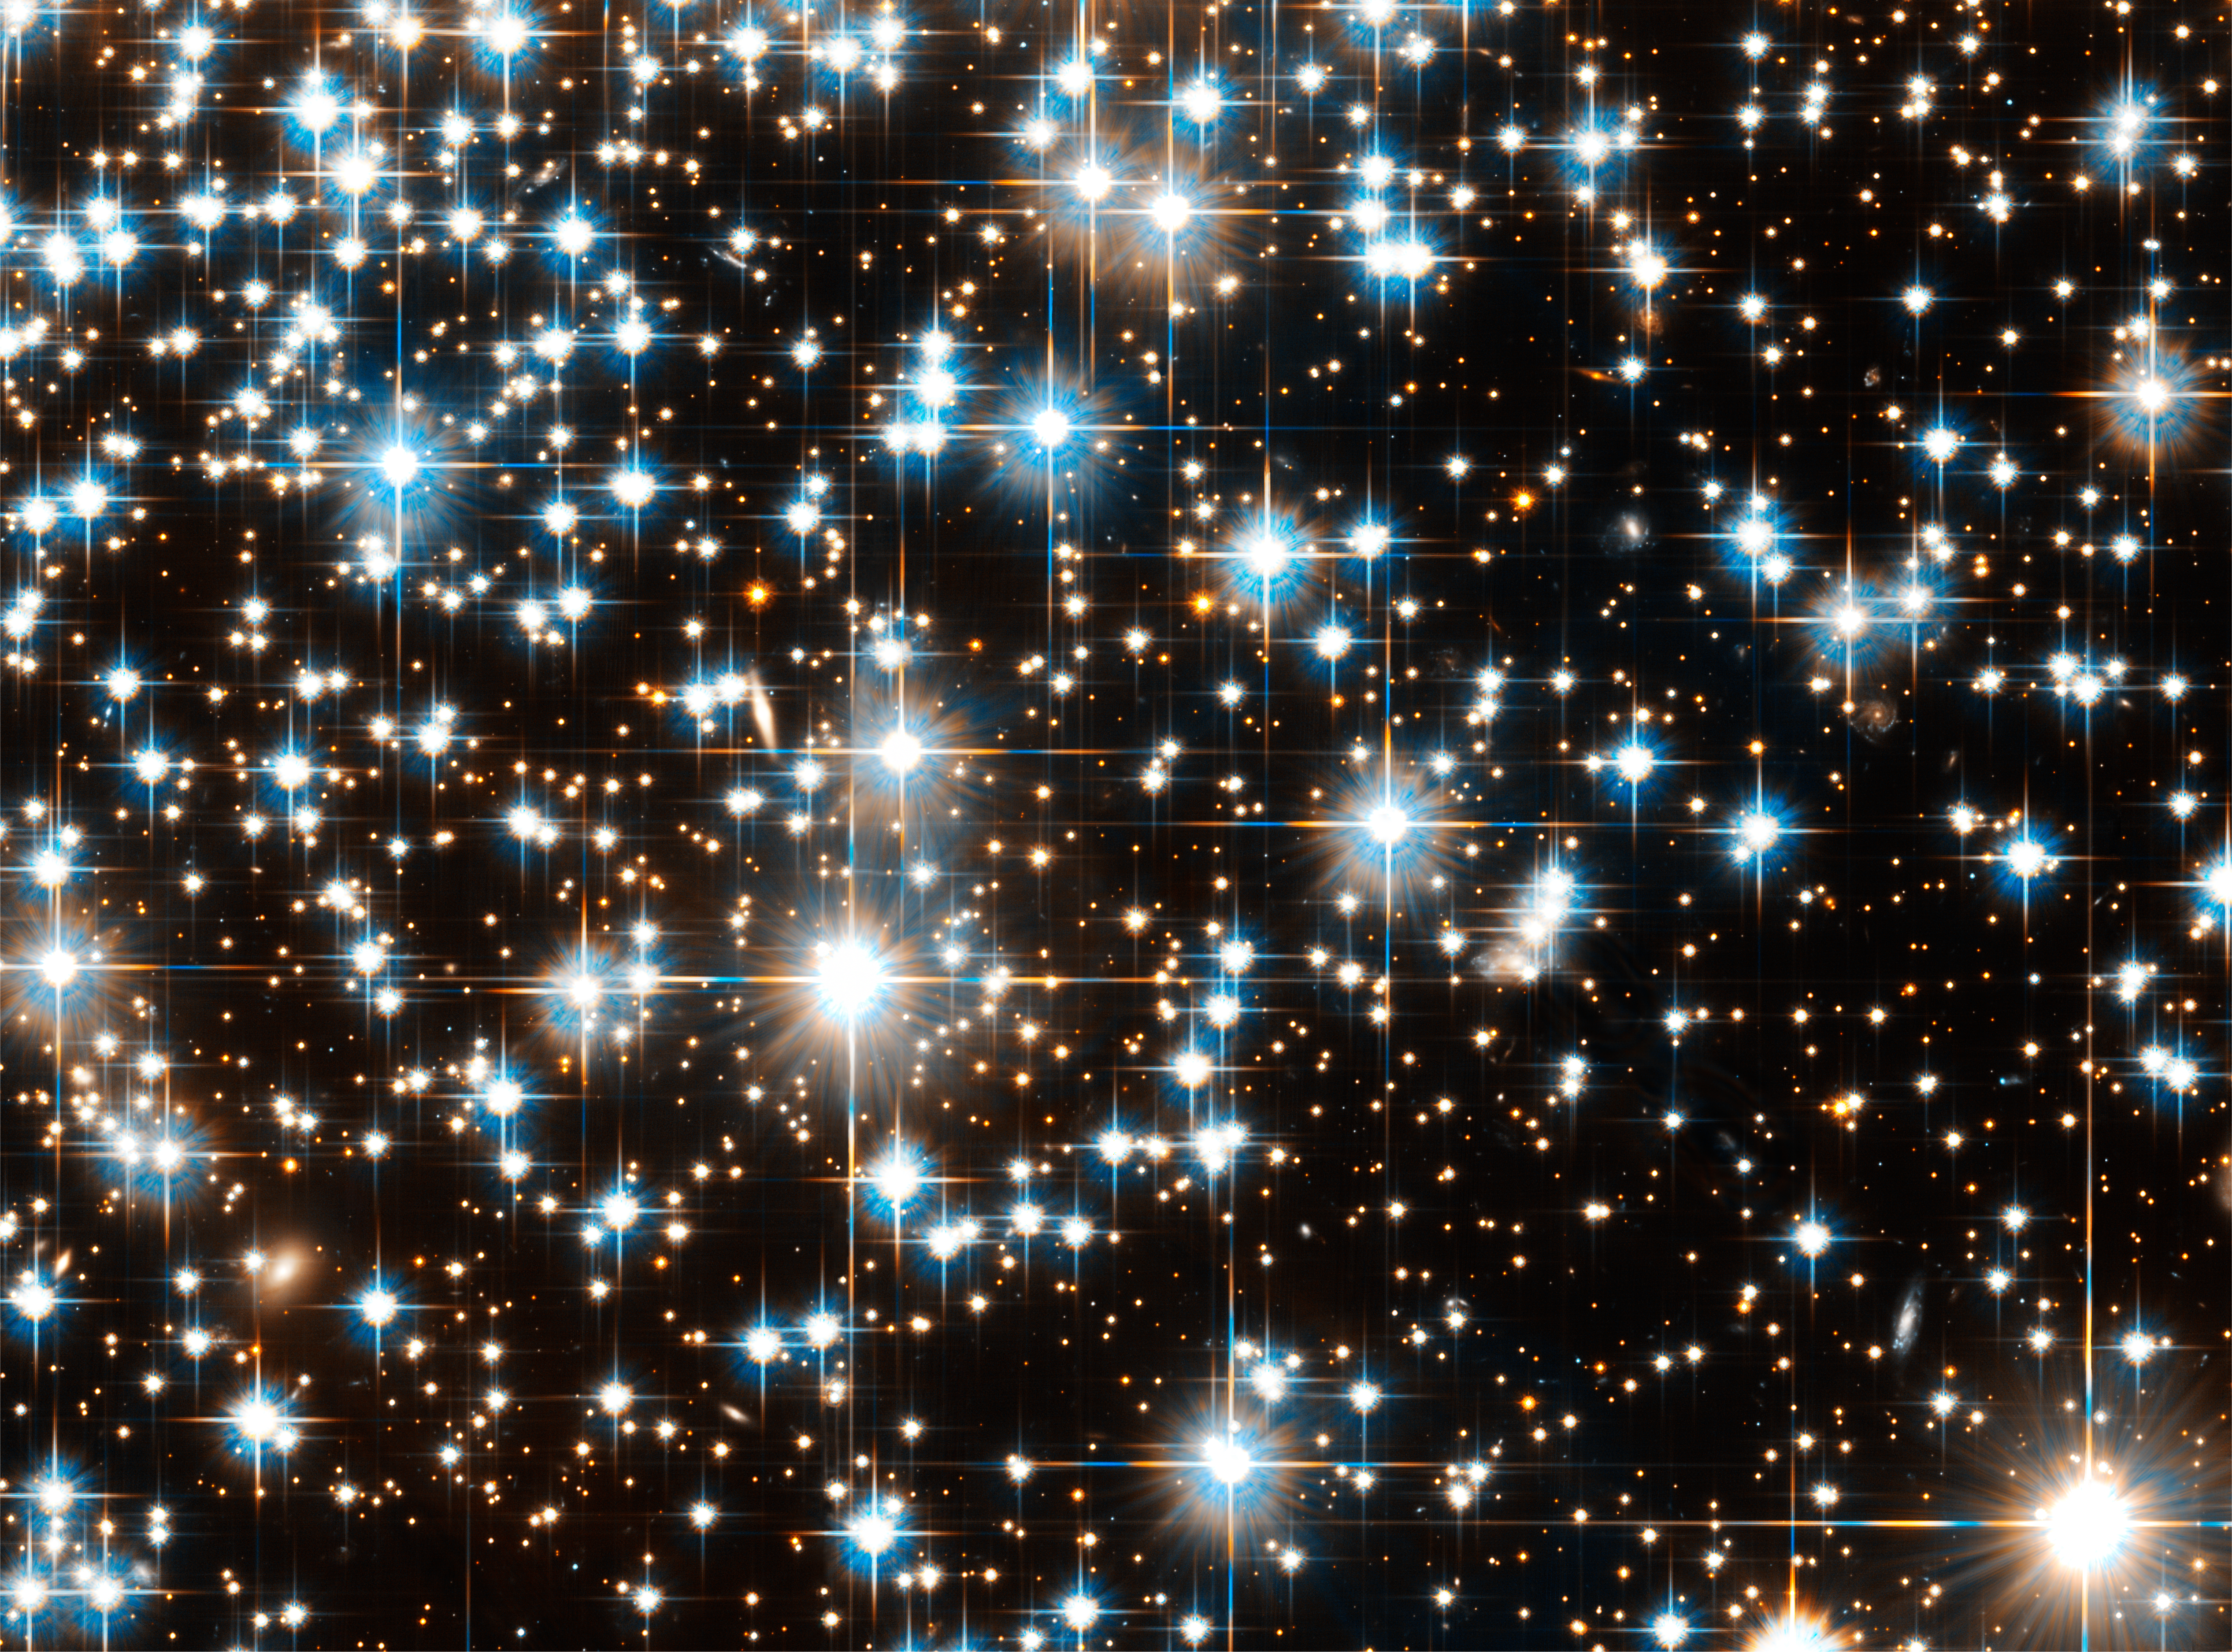

Hubble Space Telescope Image of Globular Cluster NGC 6397

Hubble Space Telescope Image of Globular Cluster NGC 6397

Credit: NASA, ESA, and H. Richer (University of British Columbia)